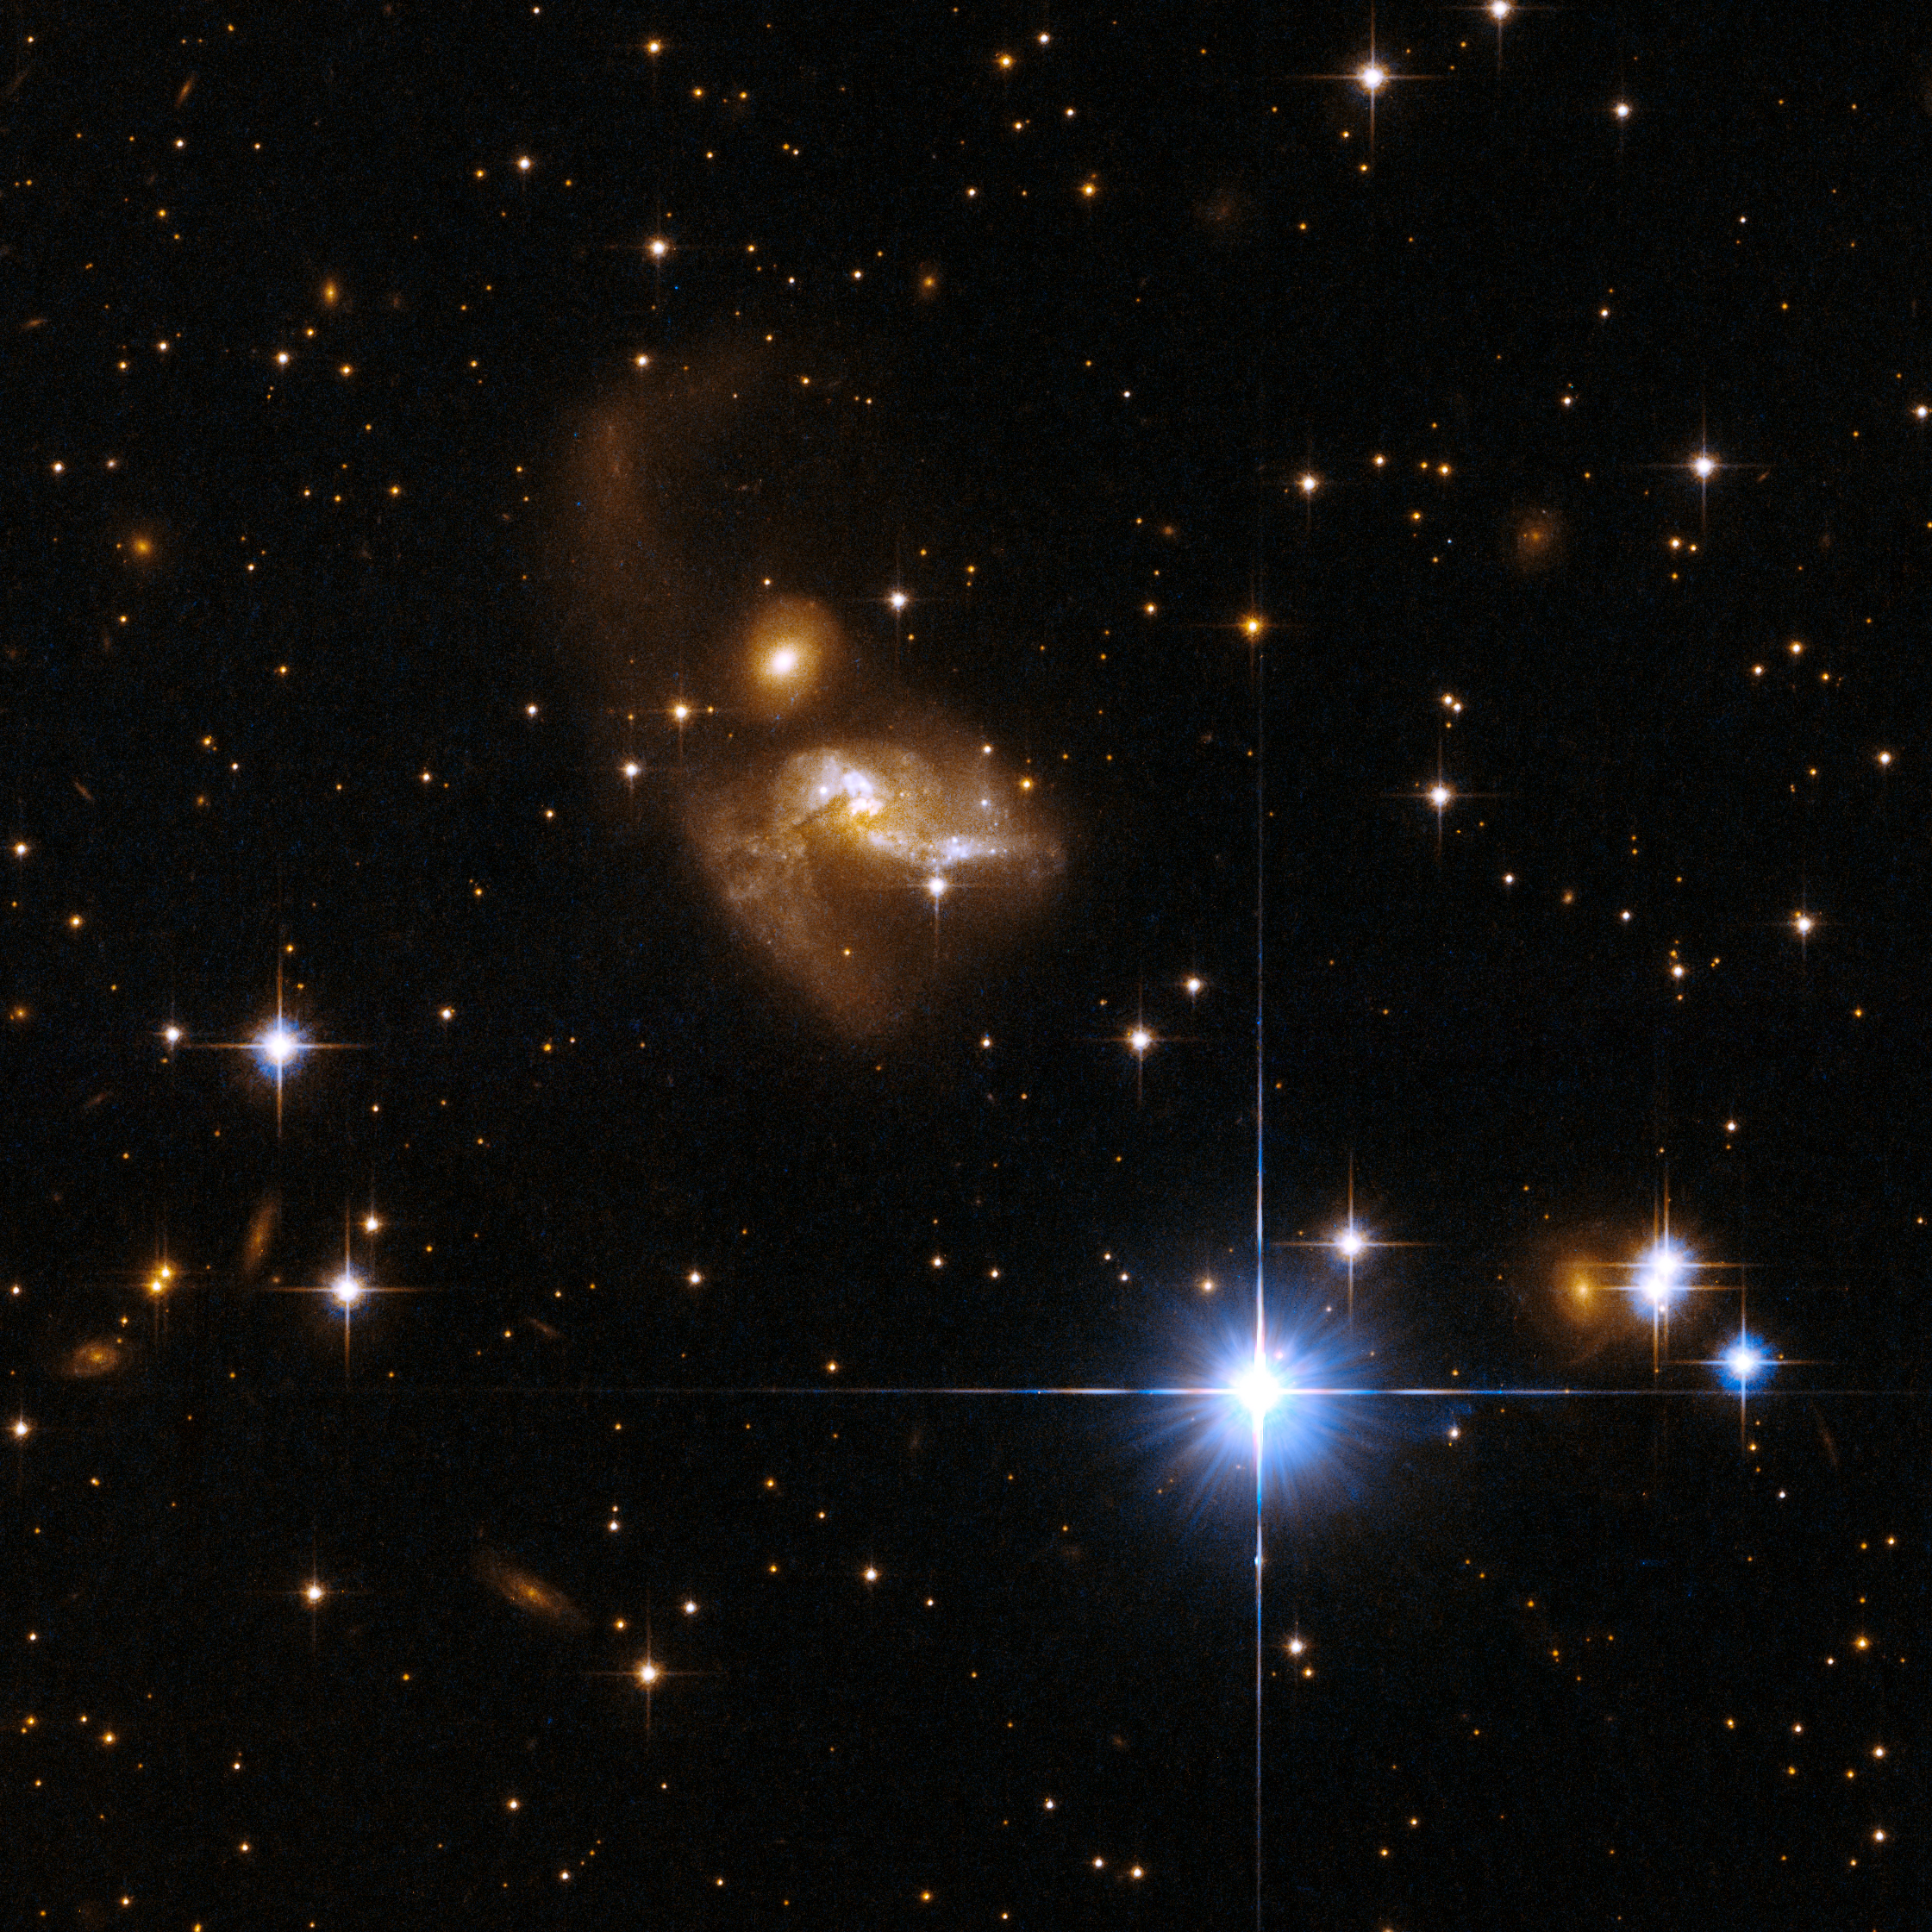

IRAS 21101+5810

This system is an interacting galaxy pair. The interaction has disturbed both galaxies: the lower galaxy has a bizarre structure and a tidal tail emerges from the main body of the upper galaxy. The galaxy pair lies in a crowded field of Milky Way stars. IRAS 21101+5810 is located in the constellation of Cepheus, the King, about 550 million light-years away from Earth.

This image is part of a large collection of 59 images of merging galaxies taken by the Hubble Space Telescope and released on the occasion of its 18th anniversary on 24th April 2008.

Credit: NASA, ESA, the Hubble Heritage Team (STScI/AURA)-ESA/Hubble Collaboration and A. Evans (University of Virginia, Charlottesville/NRAO/Stony Brook University)